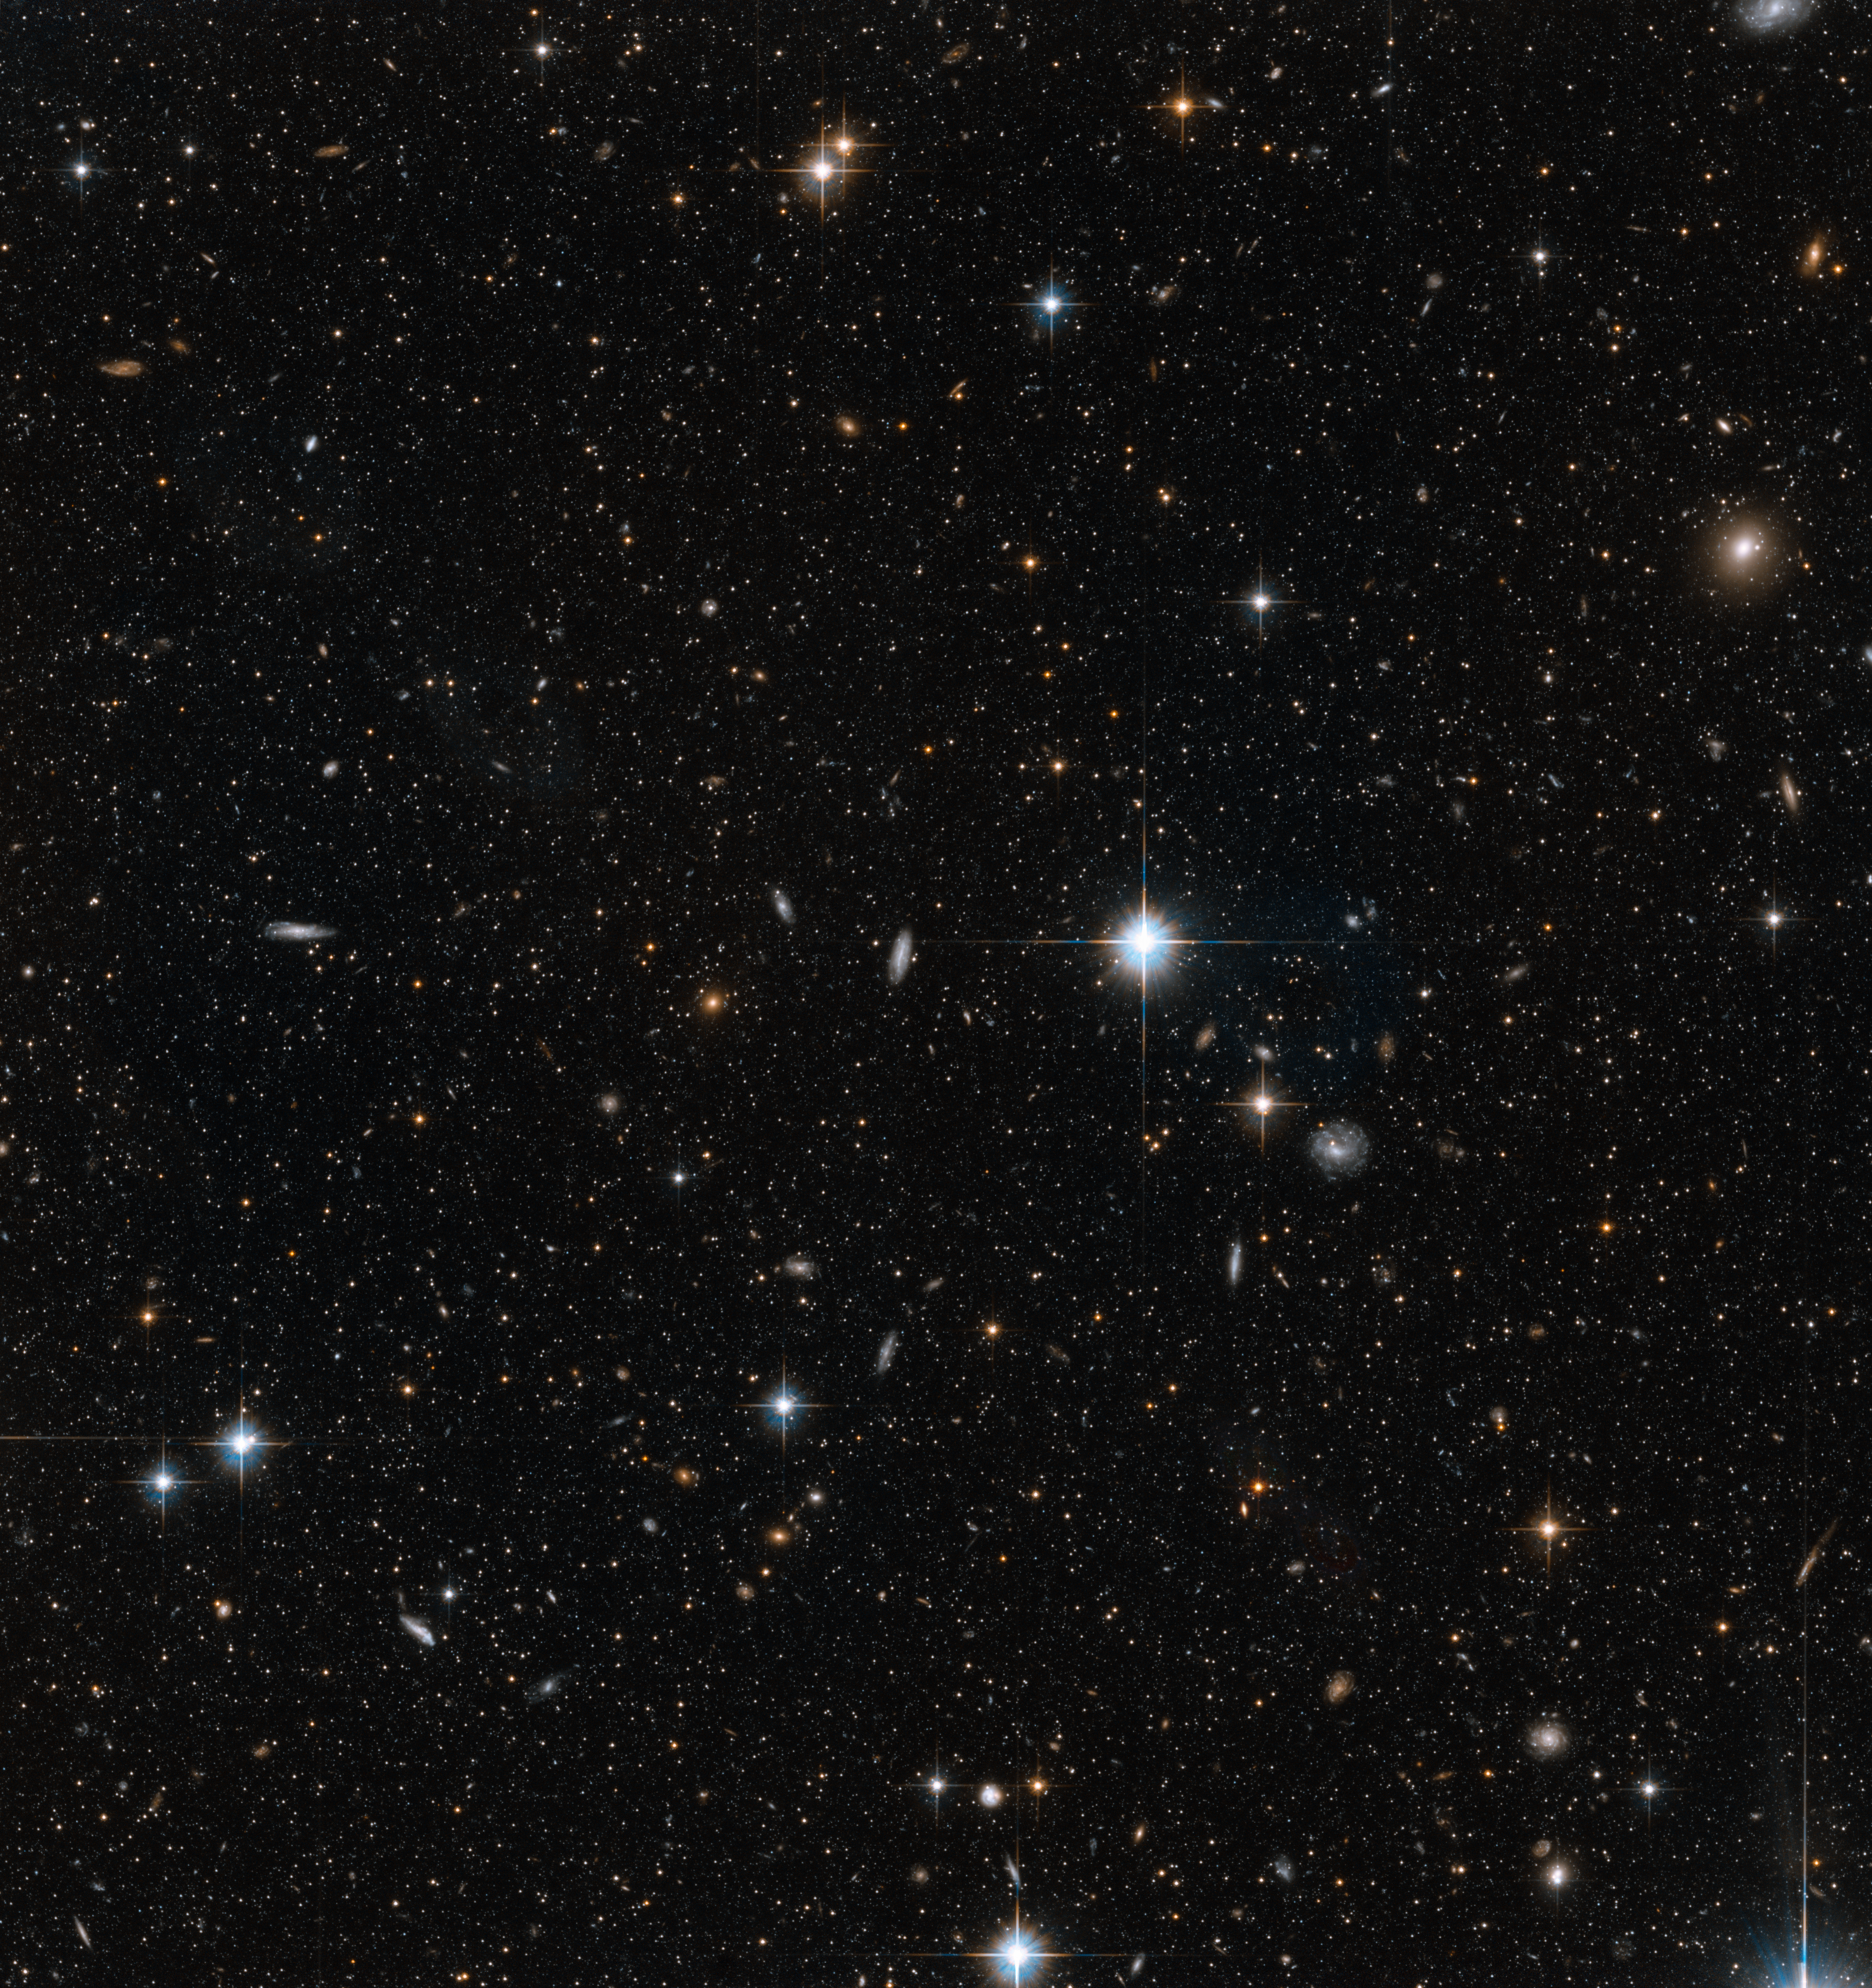

Stars in the Andromeda Galaxy’s giant stellar stream

This image shows NASA/ESA Hubble Space Telescope images of a small part of the giant stellar stream of the Andromeda Galaxy. The stream is a long structure thought to be the remains of a companion galaxy torn apart by the Andromeda Galaxy’s gravity and engulfed in it.

Hubble’s position above the distorting effect of the atmosphere, combined with the galaxy’s relative proximity, means that this image can be resolved into individual stars, rather than the cloudy white wisps usually seen in observations of galaxies.

These observations were made in order to observe a wide variety of stars in Andromeda, ranging from faint main sequence stars like our own Sun, to the much brighter RR Lyrae stars, which are a type of variable star. With these measurements, astronomers can determine the chemistry and ages of the stars in each part of the Andromeda Galaxy.

Credit: NASA, ESA and T.M. Brown (STScI)